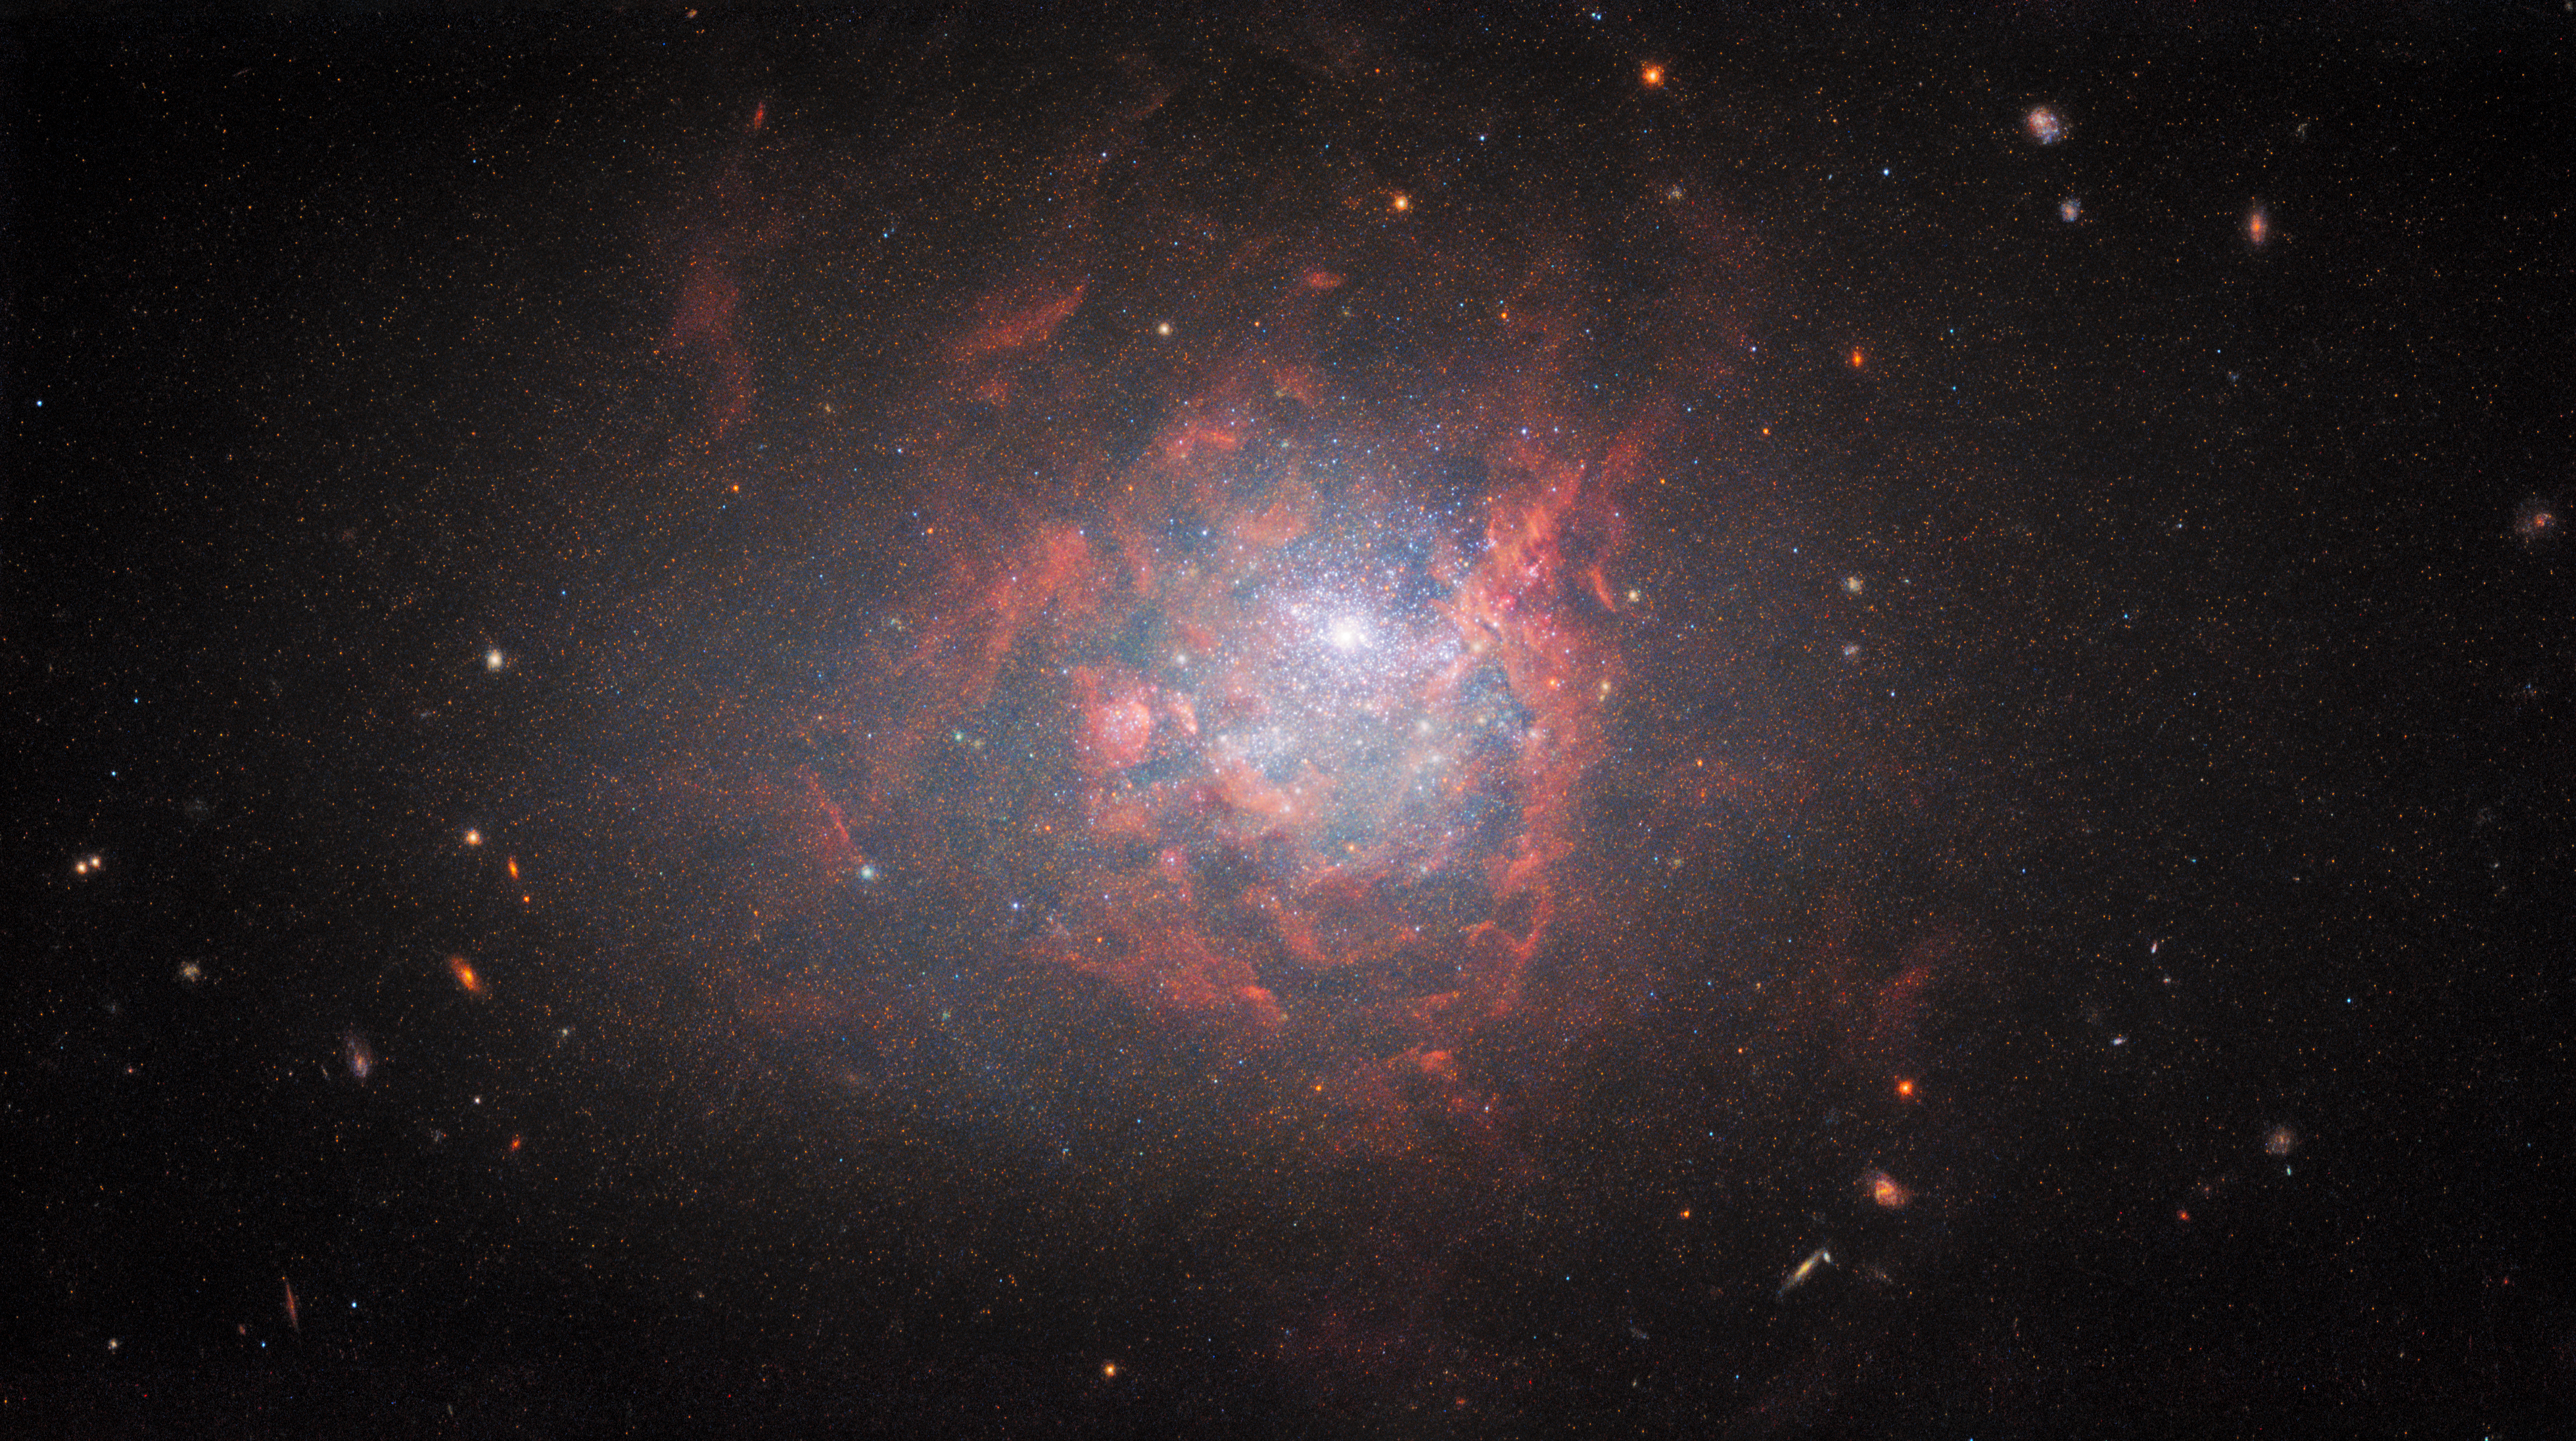

Hubble Revisits a Galactic Oddball

The dwarf galaxy NGC 1705 is featured in this image from the NASA/ESA Hubble Space Telescope. This diminutive galaxy lies in the southern constellation Pictor, and is approximately 17 million light-years from Earth. NGC 1705 is a cosmic oddball — it is small, irregularly shaped, and has recently undergone a spate of star formation known as a starburst.

Despite these eccentricities, NGC 1705 and other dwarf irregular galaxies like it can provide valuable insights into the overall evolution of galaxies. Dwarf irregular galaxies tend to contain few elements other than hydrogen or helium, and are considered to be similar to the earliest galaxies that populated the Universe.

The data shown in this image come from a series of observations designed to unveil the interplay between stars, star clusters, and ionised gas in nearby star-forming galaxies. By observing a specific wavelength of light known as H-alpha with Hubble’s Wide Field Camera 3, astronomers aimed to discover thousands of emission nebulae — regions created when hot, young stars bathe the clouds of gas surrounding them in ultraviolet light, causing them to glow.

This is not the first time that NGC 1705 has been imaged by Hubble — astronomers peered into the heart of the galaxy in 1999 using Hubble’s workhorse camera at the time, the Wide Field Planetary Camera 2. This instrument was replaced with the Wide Field Camera 3 during the fifth and final Space Shuttle mission to Hubble in 2009, and the newer instrument has provided a richer and far more detailed portrait of NGC 1705 than the 1999 observation.

Credit: ESA/Hubble & NASA, R. Chandar